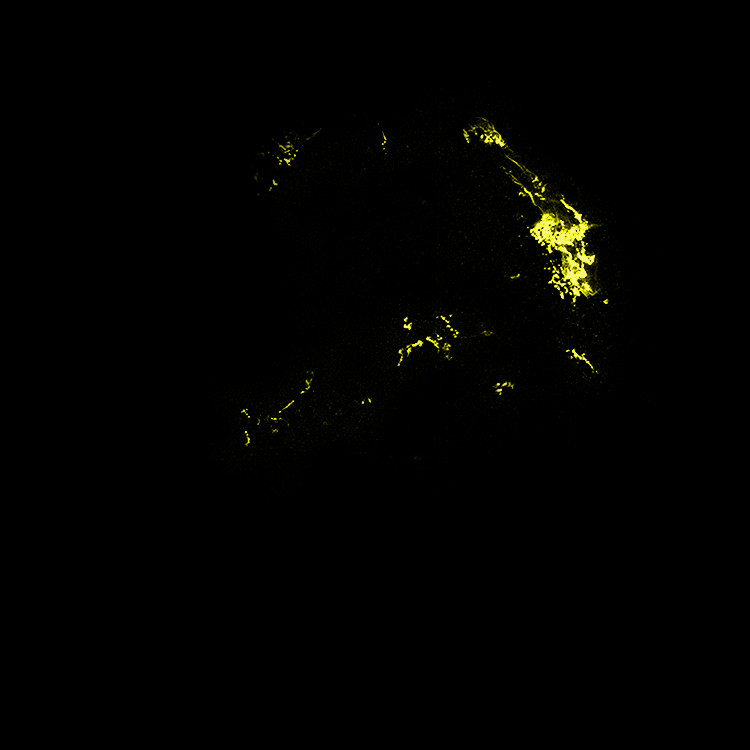

Hubble Space Telescope Visible-Light Data of Kepler's Supernova Remnant

Supernovae are extremely luminous and cause a burst of radiation that often briefly outshines an entire galaxy, before fading from view over several weeks or months. During this short interval a supernova can radiate as much energy as the Sun is expected to emit over its entire life span.

Credit: NASA, ESA, R. Sankrit and W. Blair (Johns Hopkins University)